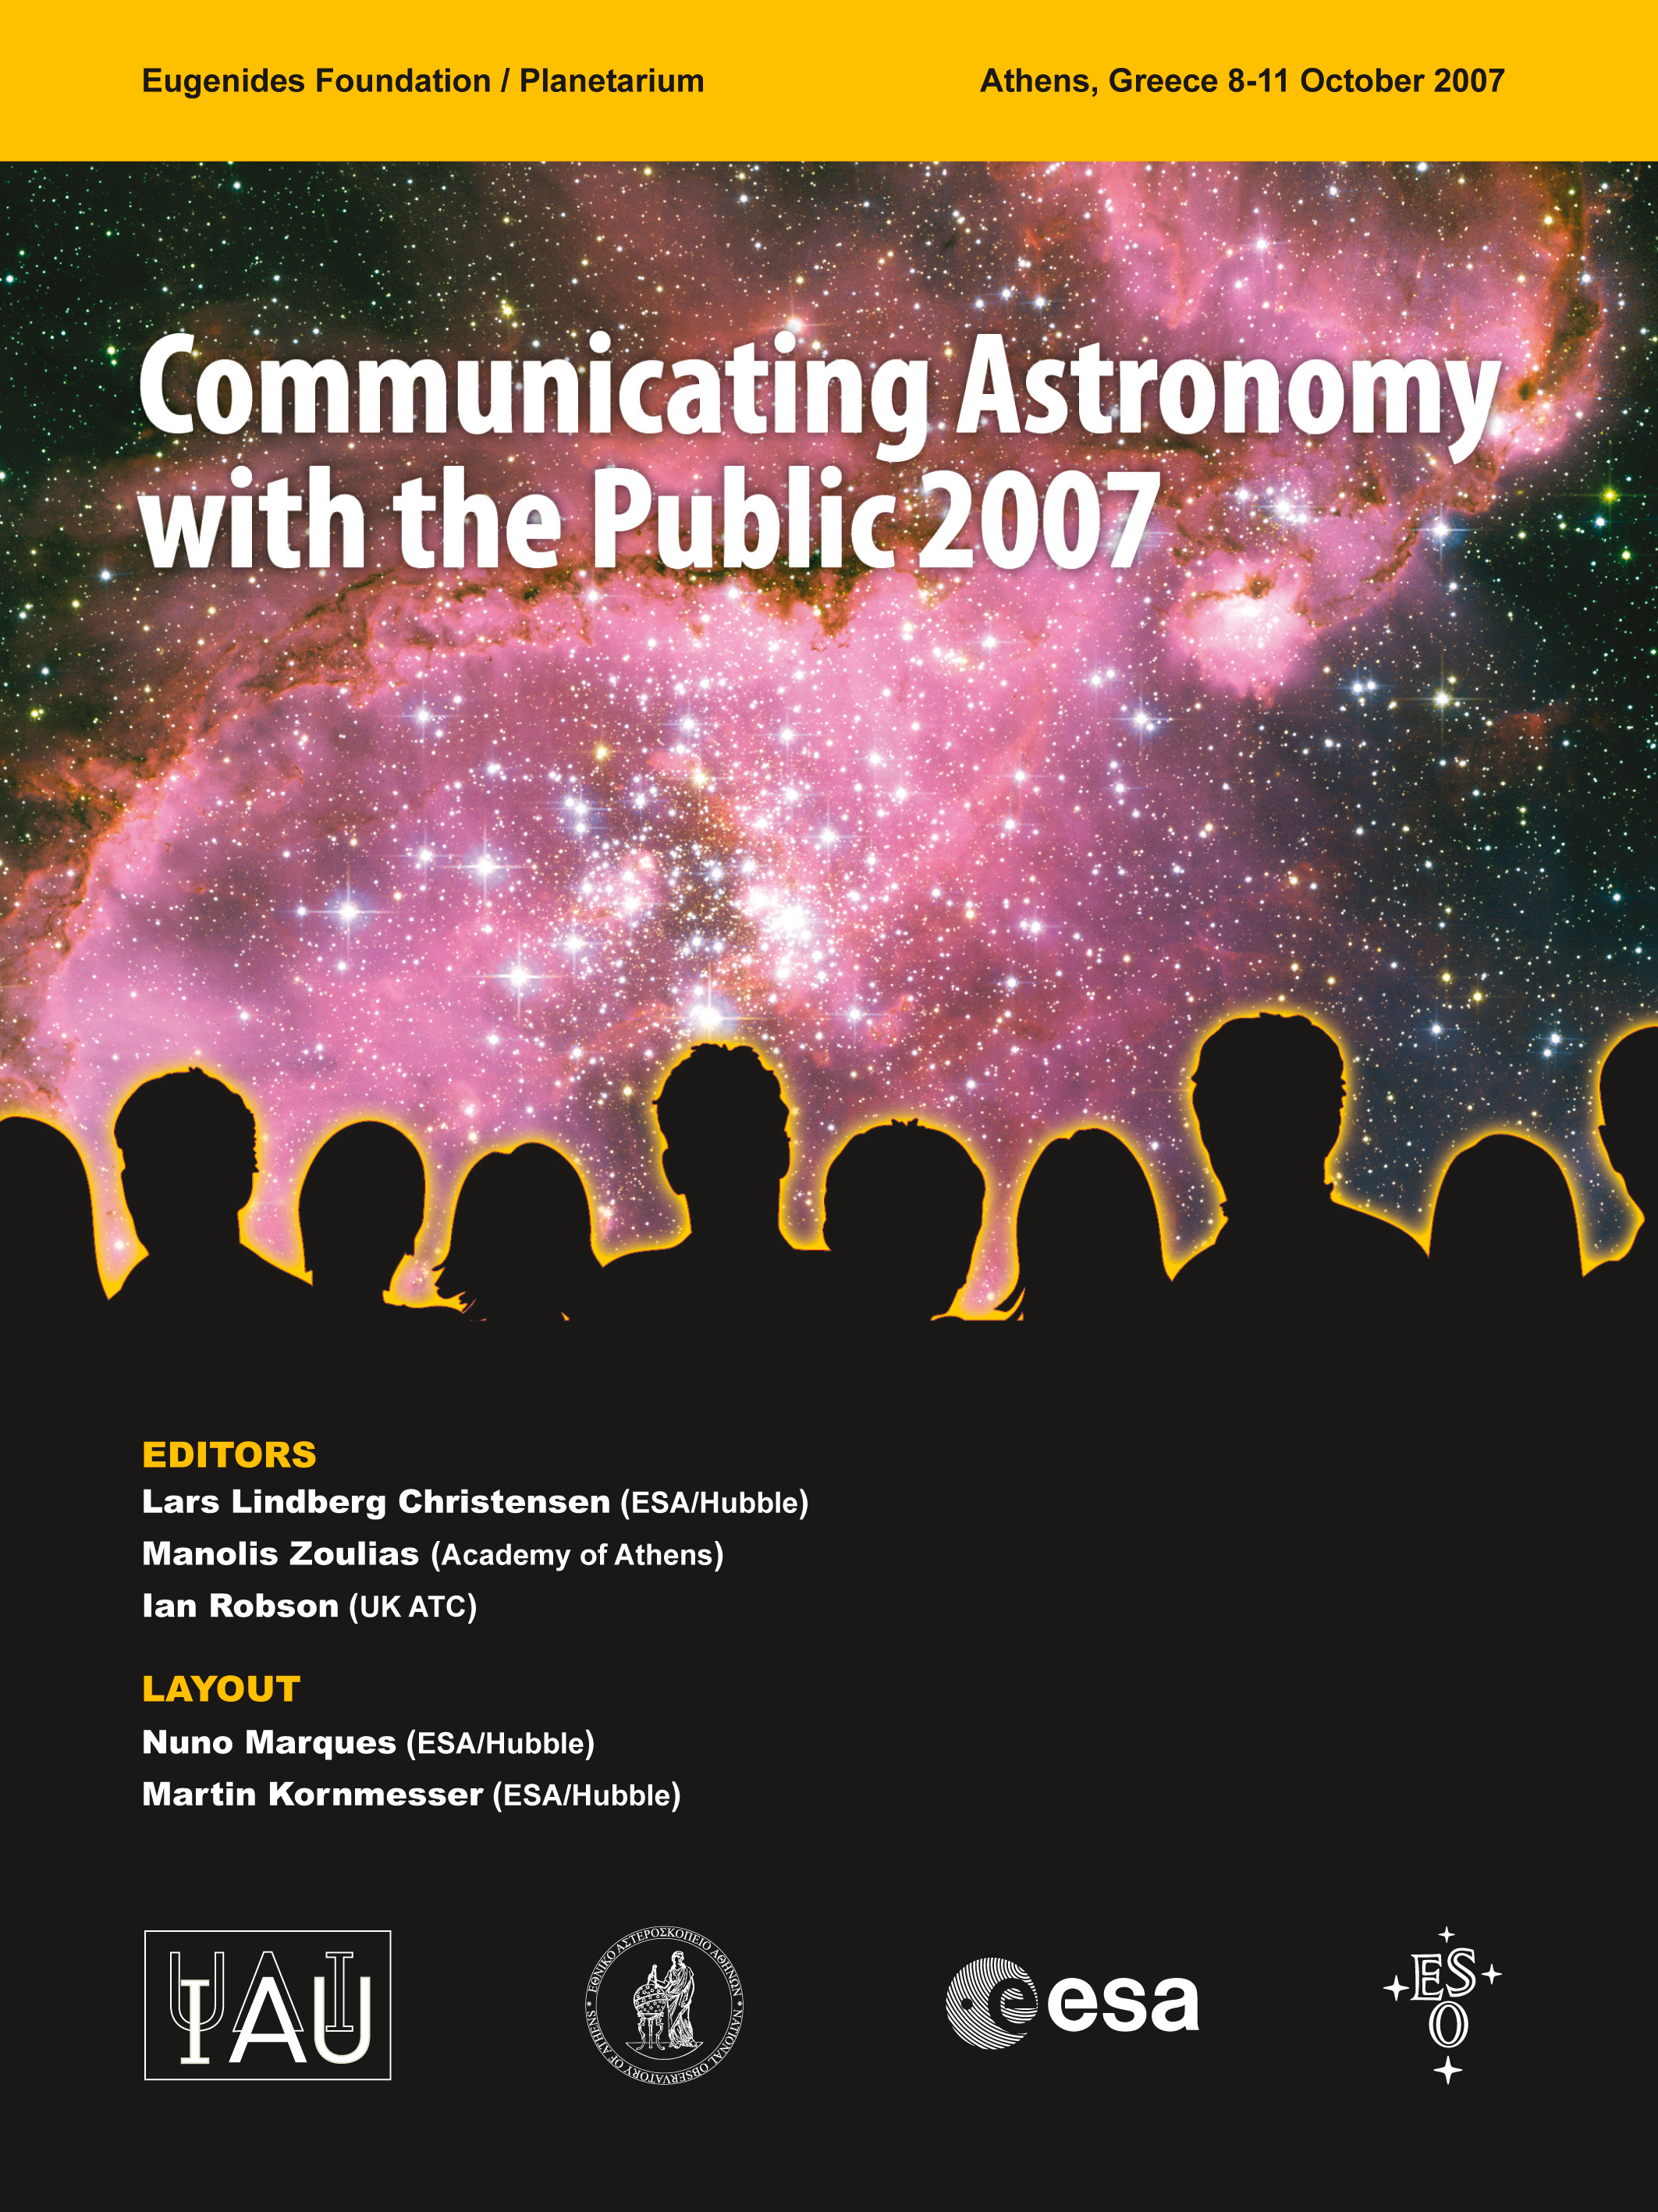

Proceedings of Communicating Astronomy with the Public 2007

The conference Communicating Astronomy with the Public 2007 was held in Athens, Greece, from 8 to 11 October 2007. It aimed to bring together the producers of astronomical information (research scientists), public information officers (connected with large observatories and space missions), and mediators (science reporters and writers, staff members from museums, planetariums).

The key topics of the meeting were:

The International Year Astronomy 2009 (main theme)
Case studies
Communicating in the Web 2.0 / YouTube / MySpace / vodcasting mediascape
Audiovisual & multimedia communication incl. tools and techniques
Social impact and evaluation of astronomy communication
Communication catering to special needs

The proceedings of the Communicating Astronomy with the Public 2007 meeting is available online (check the links below).

Credit: NASA & ESA